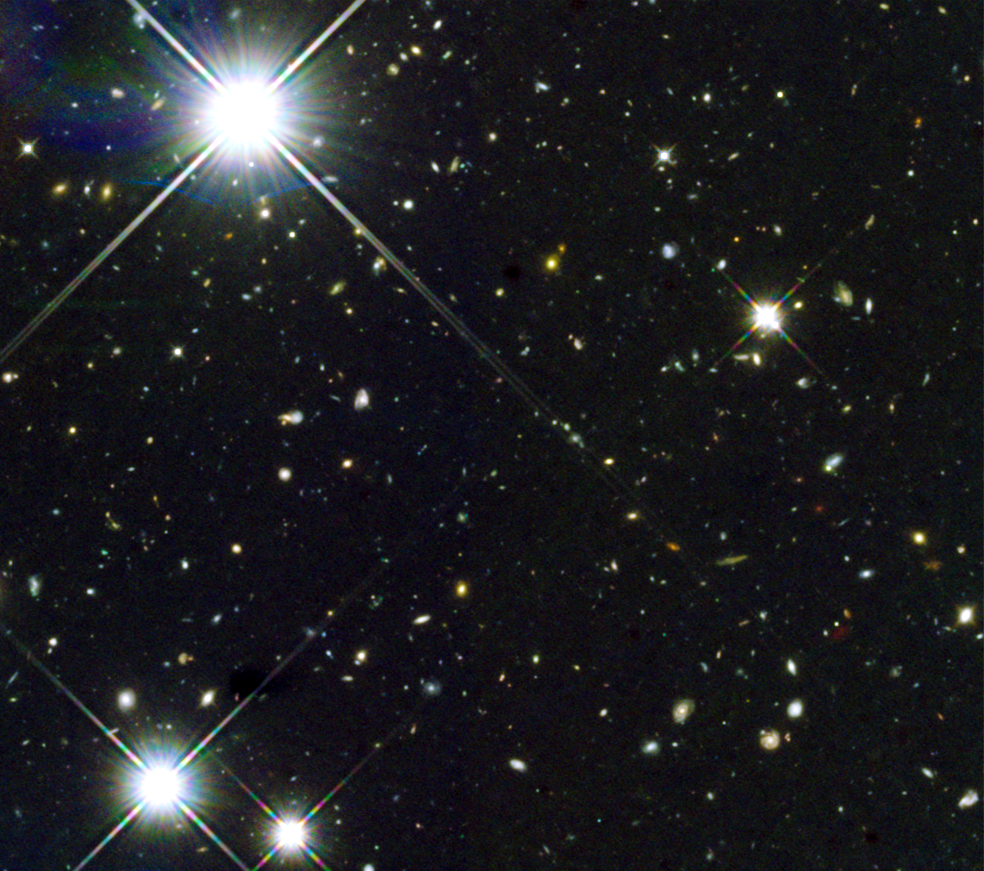

Hubble view of Himiko

This image shows the field around a giant primordial bubble of gas dubbed "Himiko" (after the queen of ancient Japan), as viewed by Hubble.

Astronomers using the combined power of the NASA/ESA Hubble Space Telescope and the Atacama Large Millimeter/submillimeter Array (ALMA) telescope have discovered that a trio of primitive galaxies are actually nestled inside this enormous gas blob. The rare triple system existed when the Universe was only 800 million years old. The trio may eventually merge into a single massive galaxy, researchers predict.

Credit: NASA, ESA, ESO, NRAO, NAOJ, JAO, M. Ouchi (University of Tokyo), R. Ellis (California Institute of Technology), Y. Ono (University of Tokyo), K. Nakanishi (The Graduate University for Advanced Studies (SOKENDAI) and Joint ALMA Observatory), K. Kohno and R. Momose (University of Tokyo), Y. Kurono (Joint ALMA Observatory), M. Ashby (Harvard-Smithsonian Center for Astrophysics), K. Shimasaku (University of Tokyo), S. Willner and G. Fazio (Harvard-Smithsonian Center for Astrophysics), Y. Tamura (University of Tokyo), and D. Iono (National Astronomical Observatory of Japan)